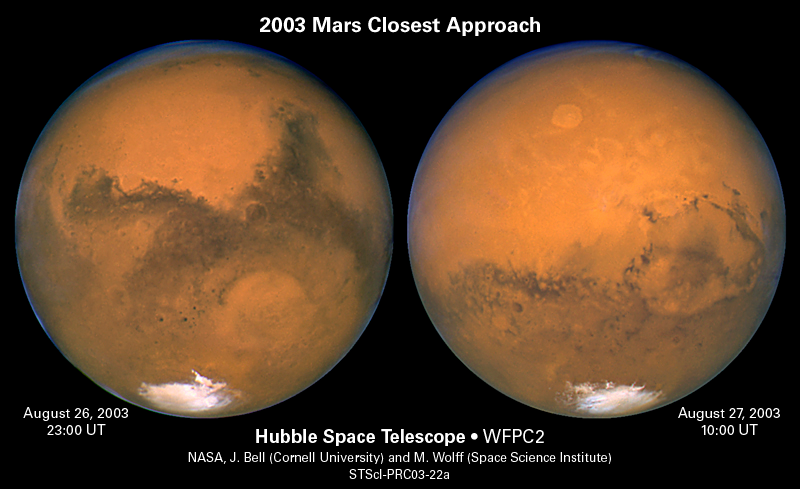

The Two Faces of Mars

These two images, taken 11 hours apart with NASA/ESA Hubble Space Telescope, reveal two nearly opposite sides of Mars. Hubble snapped these photos as the red planet was making its closest approach to Earth in almost 60,000 years. Mars completed nearly one half a rotation between the two observations.

The image at left was assembled from a series of exposures taken between 6:20 p.m. and 7:12 p.m. EDT Aug. 26 with Hubble's Wide Field and Planetary Camera 2. Hubble snapped this photo when Mars and Earth were 34,648,840 miles (55,760,220 km) apart.

Credit: NASA/ESA, J. Bell (Cornell U.) and M. Wolff (SSI)